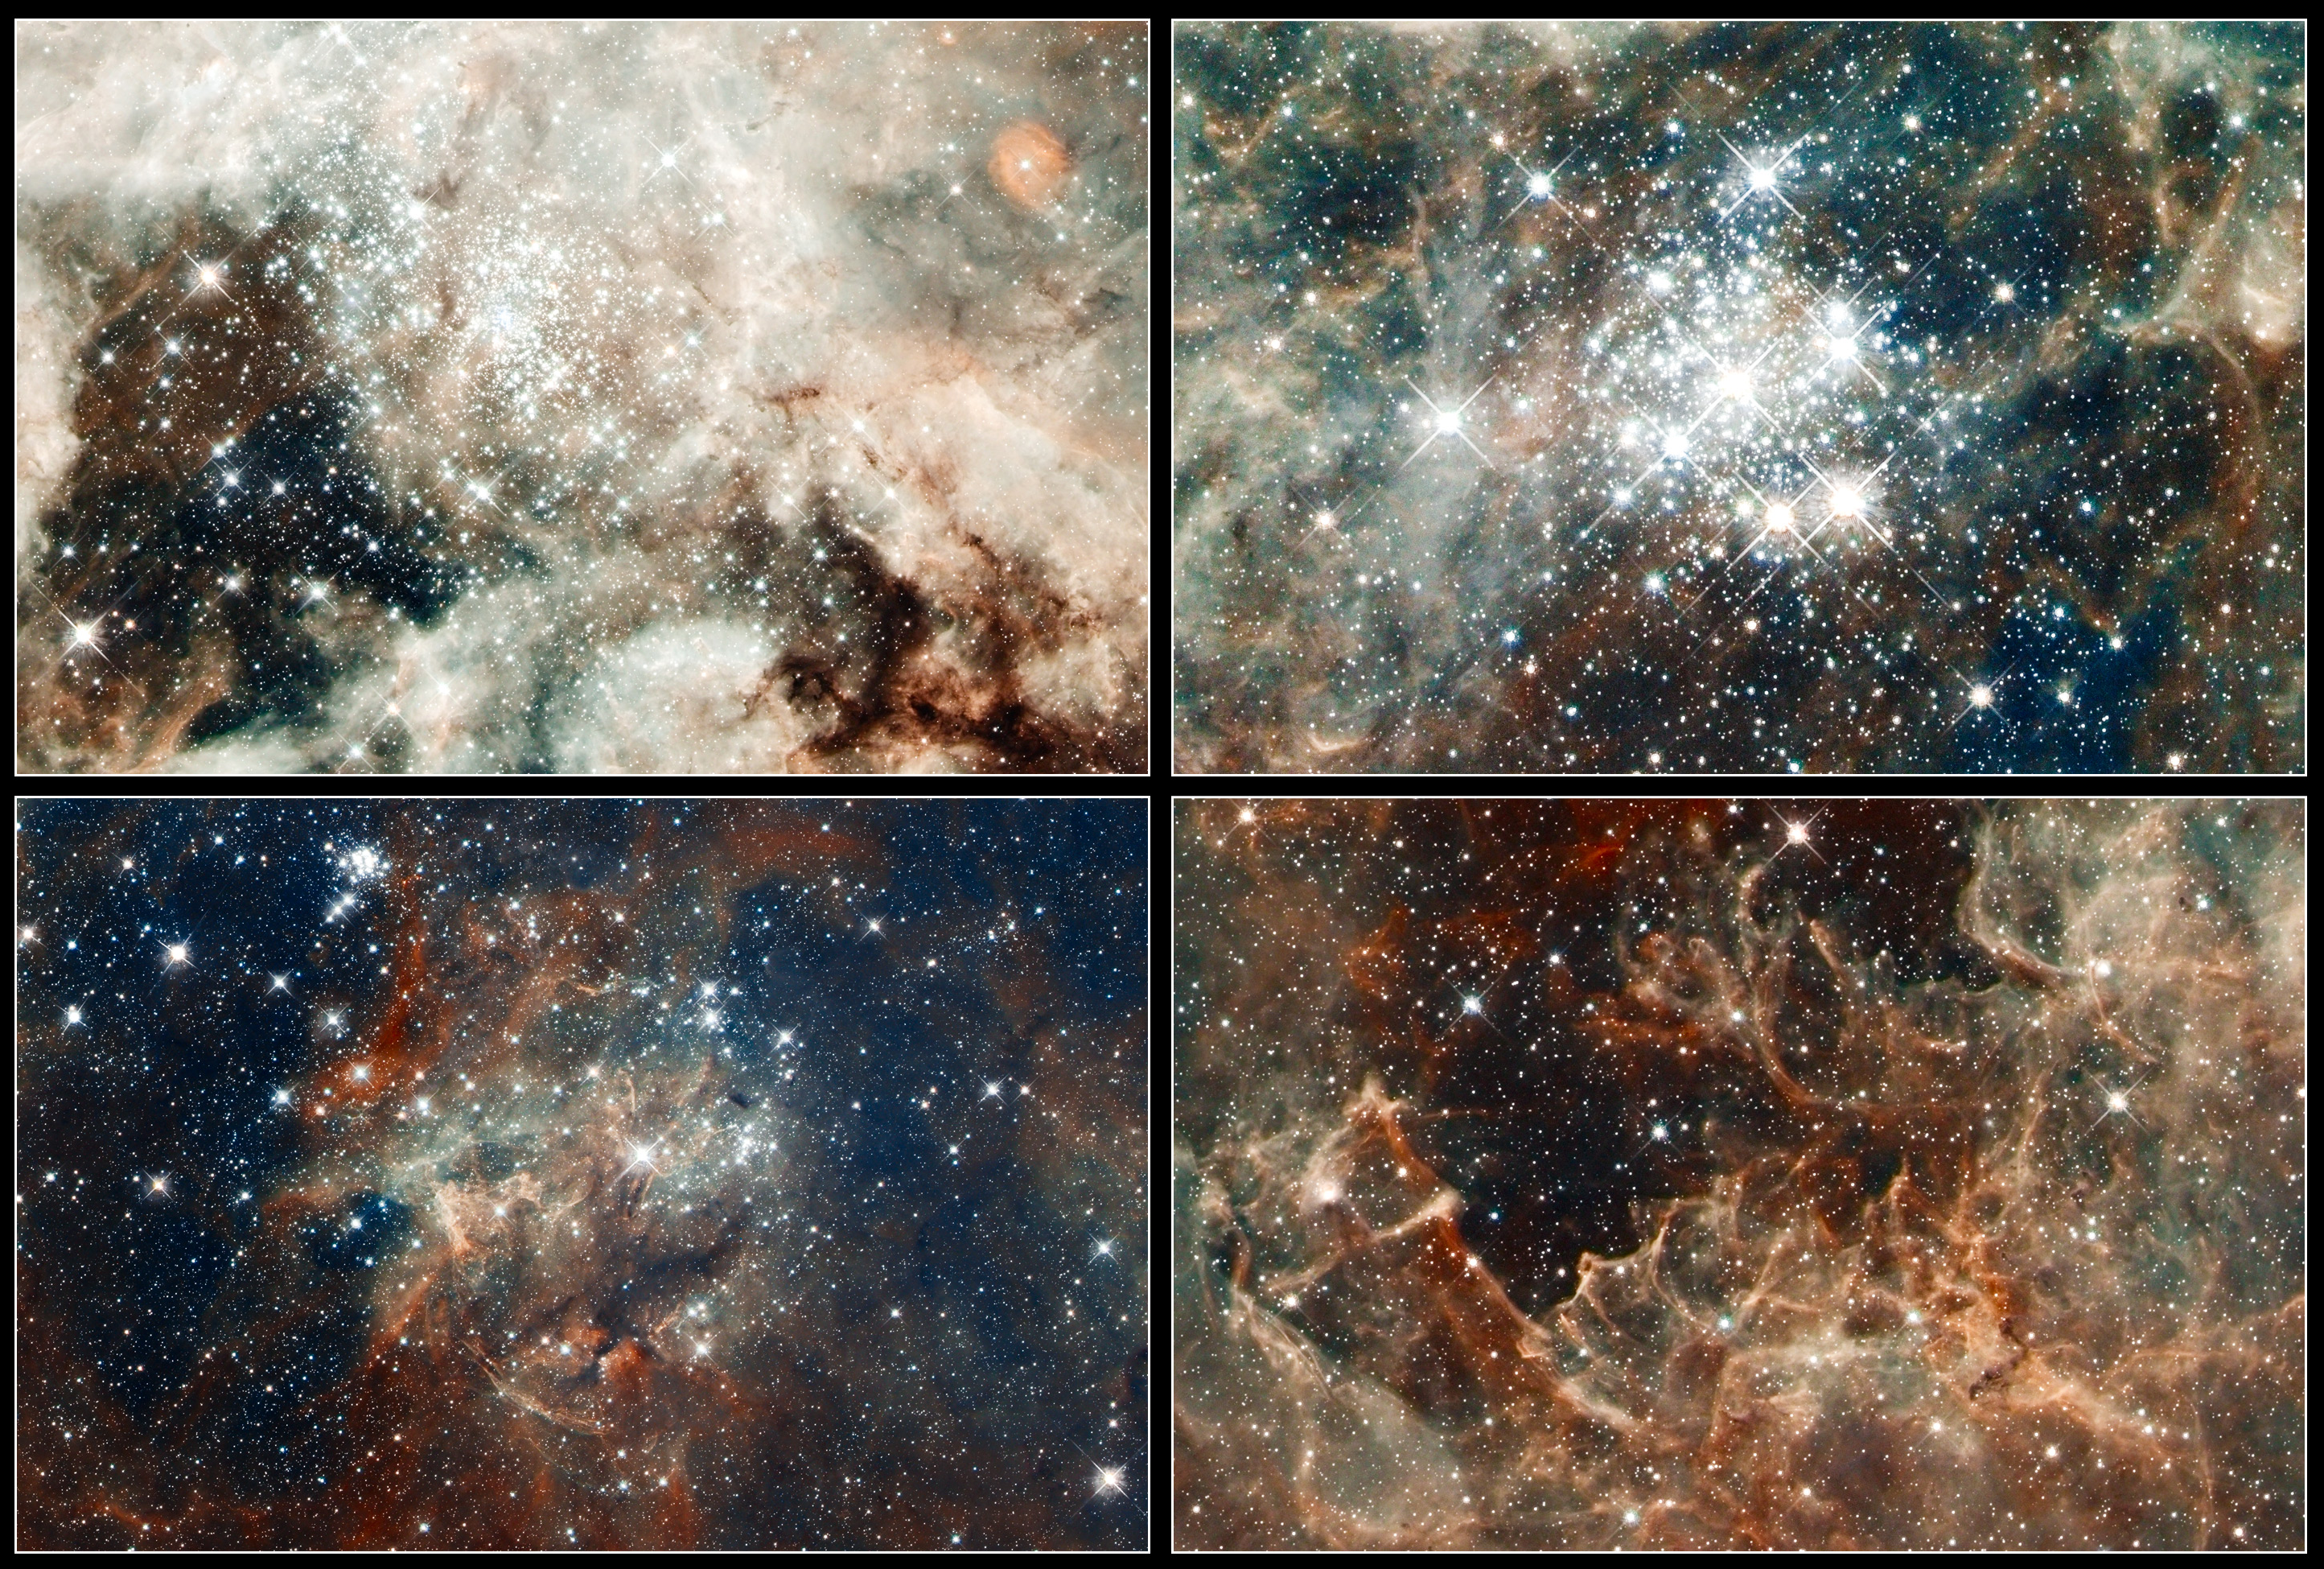

Close-up images of features in the Tarantula Nebula

From massive star clusters to sculpted gas embedded with fledgling stars, these four close-up images underscore why 30 Doradus, located in the heart of the Tarantula nebula, is a star-making factory.

30 Doradus is the brightest nearby star-forming region and home to the most massive stars in our cosmic neighborhood of about 25 galaxies. The nebula is close enough to Earth that Hubble can resolve individual stars, giving astronomers important information about the stars' birth and evolution. 30 Doradus resides 170 000 light-years away in the Large Magellanic Cloud, a small, satellite galaxy of our Milky Way.

Top Left
The nebula’s sparkling centrepiece is a giant, young star cluster named NGC 2070, only 2 million years old. Its stellar inhabitants number roughly 500 000. The cluster is a hotbed for young, massive stars. The cluster's dense core, known as RMC 136, is packed with some of the heftiest stars found in the nearby universe.

The cluster’s core is home to more than 10 000 stars. Several of them may be over 100 times more massive than our Sun. These hefty stars are destined to pop off, like a string of firecrackers, as supernovae in a few million years. Only two or three of the hottest stars in RMC 136 are providing 50 percent of the radiation in the cluster.

Bottom Left
The star cluster NGC 2060 is a loose collection of stars that are no longer gravitationally bound to each other. The stellar grouping will disperse in a few million years. It contains a supernova that exploded about 10 000 years ago, blowing out gas surrounding it. The dark region below the cluster is a dense cloud of dust lying in front of it.

Top Right
The star cluster Hodge 301 is 20 million to 25 million years old. Hodge 301 is home to many aging, red super giant stars, indicating the cluster is older. Roughly 40 massive stars already have exploded as supernovae. The expanding wave of debris is slamming into gas ejected by stars in RMC 136, creating a ridge of star formation between the two clusters. The fledgling stars are embedded in dense gas and cannot be seen.

Bottom Right
This region resembles a coral reef, but the gas has been eroded by the hefty stars in RMC 136, situated above it. Cloaked in gas at the top of this rugged, gaseous terrain are nascent stars that cannot be seen. Dense columns of gas, several light-years long, protrude from the undulating landscape. These gaseous columns are incubators for developing stars.

The images are part of one of the largest mosaics ever assembled from Hubble photos and include observations taken by Hubble’s Wide Field Camera 3 and Advanced Camera for Surveys, which trace the structure of the nebula, combined with observations of glowing oxygen and hydrogen from the European Southern Observatory’s MPG/ESO 2.2-metre telescope, which show the colours of the glowing gases present.

The Hubble observations of 30 Doradus were made in October 2011. Hubble observed 30 separate fields, 15 with each camera.

Credit: NASA, ESA, ESO, D. Lennon and E. Sabbi (ESA/STScI), J. Anderson, S. E. de Mink, R. van der Marel, T. Sohn, and N. Walborn (STScI), N. Bastian (Excellence Cluster, Munich), L. Bedin (INAF, Padua), E. Bressert (ESO), P. Crowther (Sheffield), A. de Koter (Amsterdam), C. Evans (UKATC/STFC, Edinburgh), A. Herrero (IAC, Tenerife), N. Langer (AifA, Bonn), I. Platais (JHU) and H. Sana (Amsterdam)